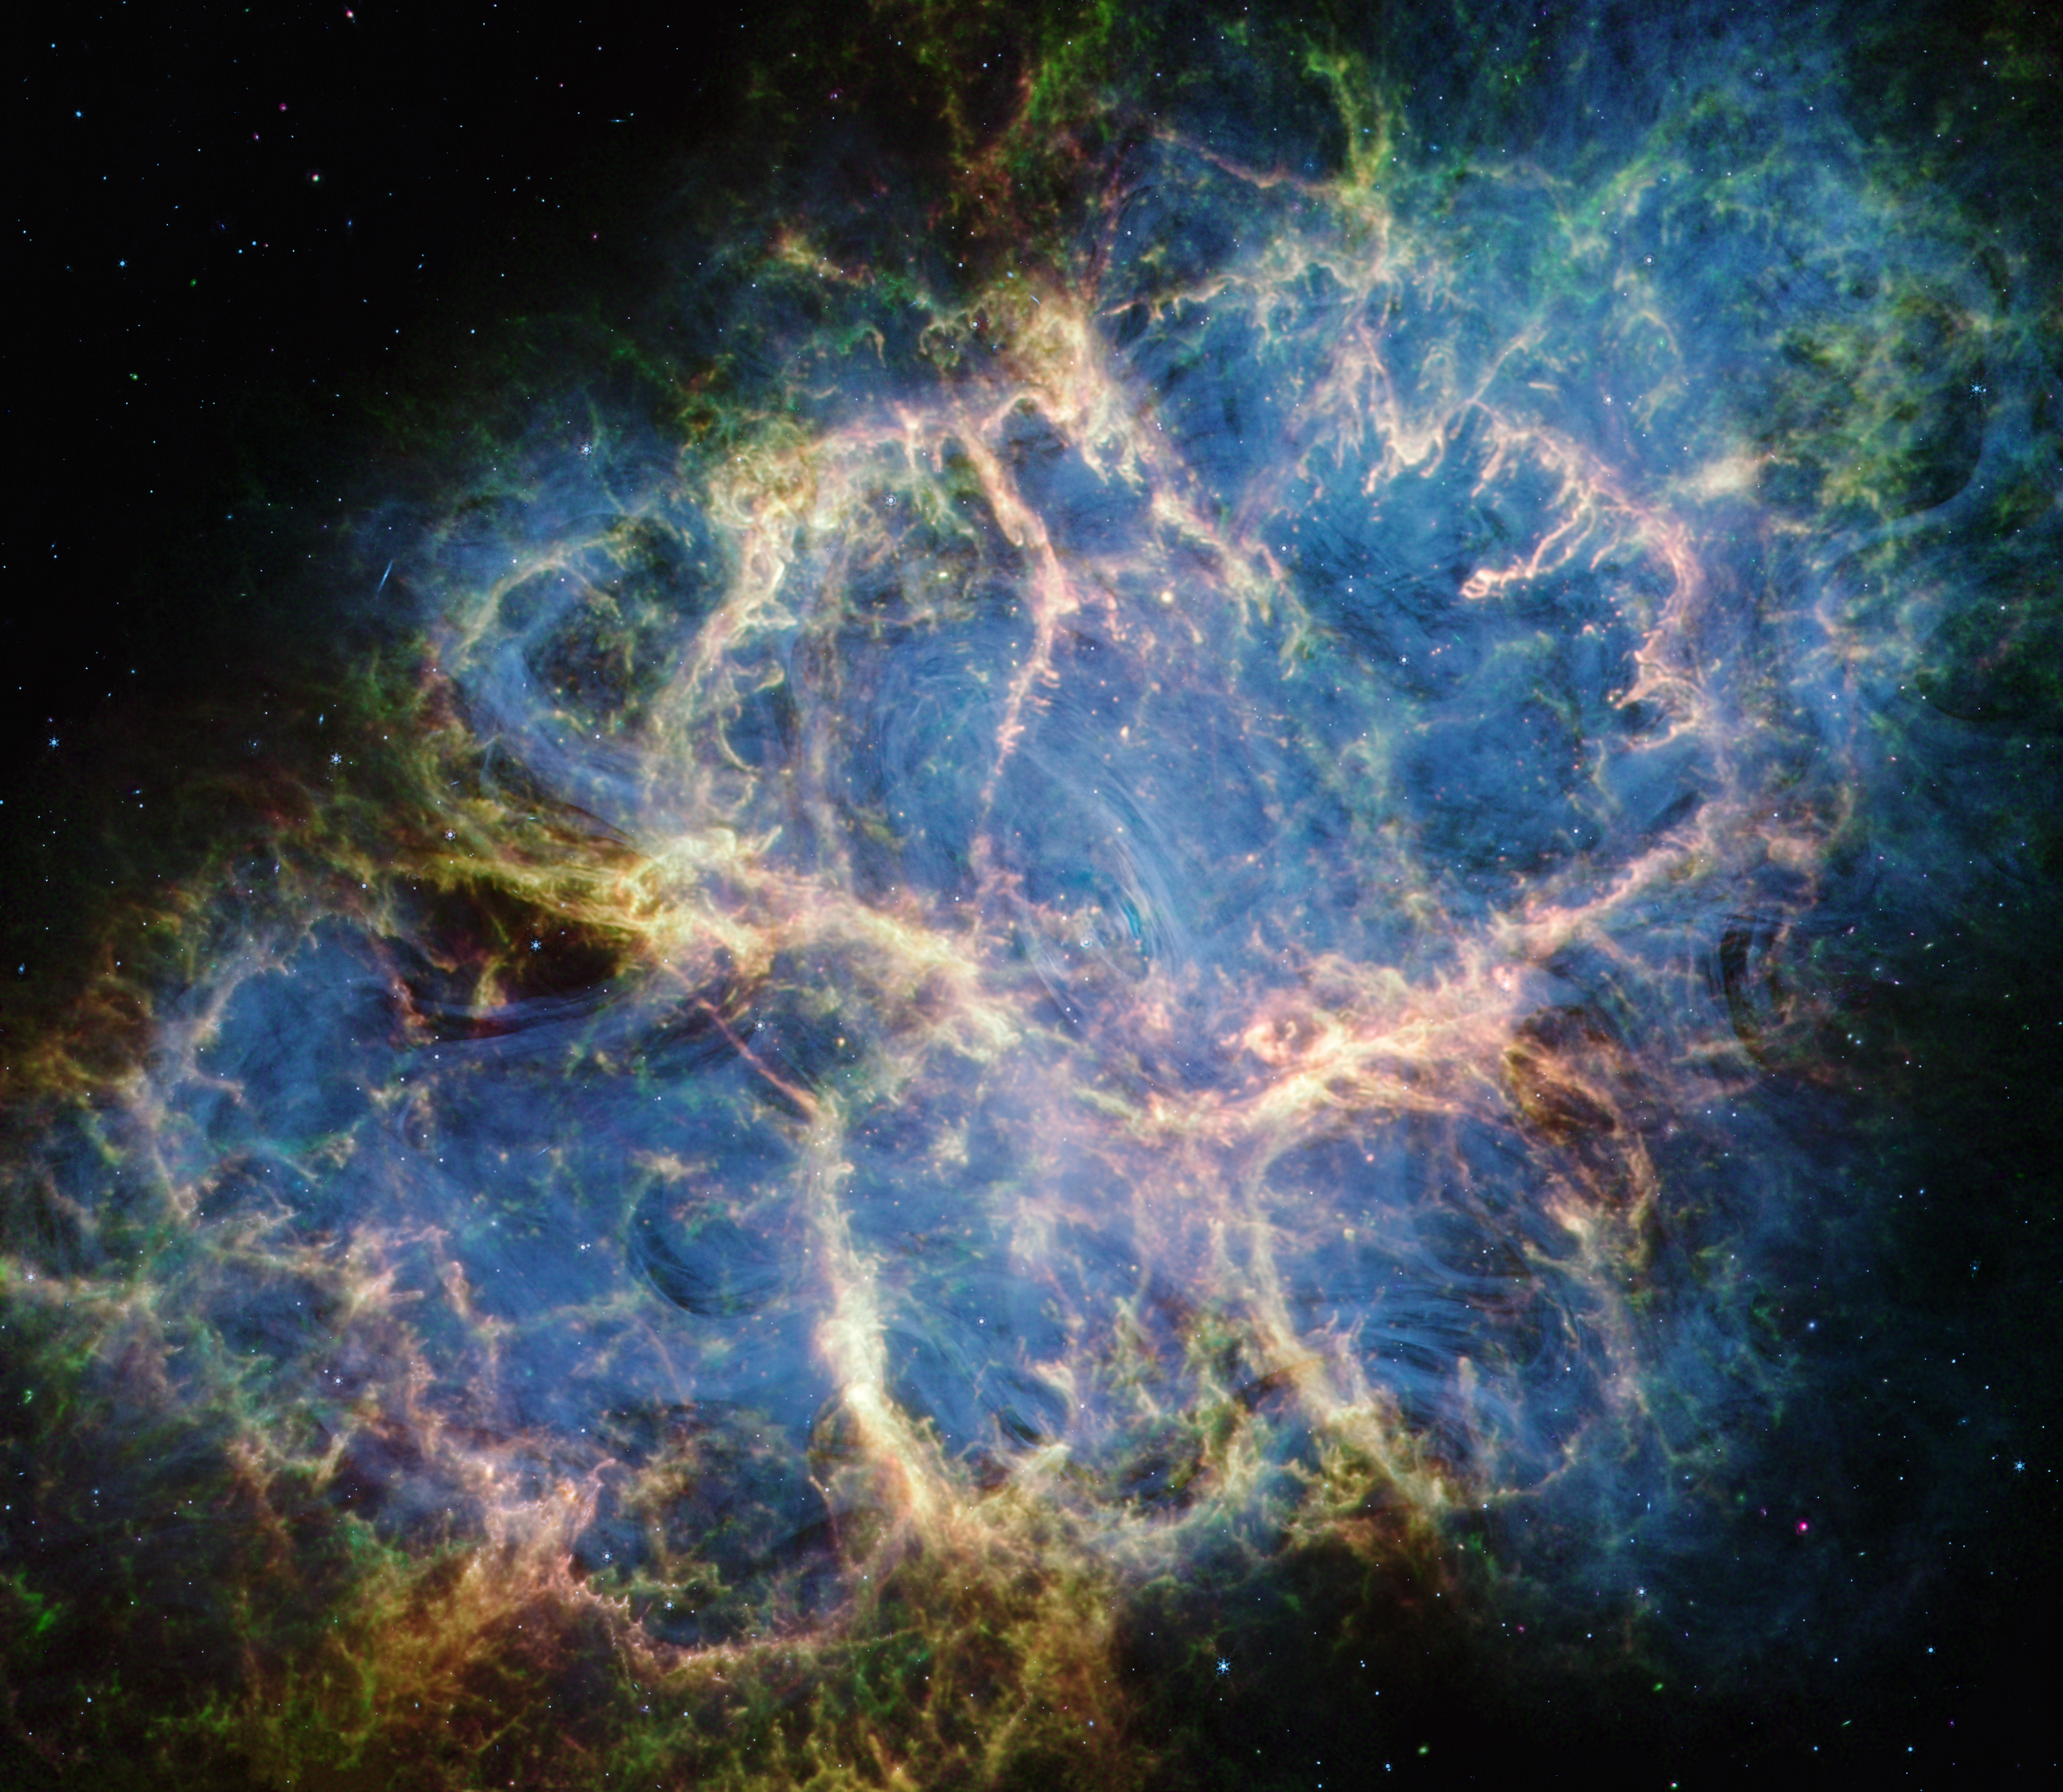

Crab Nebula (MIRI and NIRCam image)

The NASA/ESA/CSA James Webb Space Telescope dissected the Crab Nebula’s structure, aiding astronomers as they continue to evaluate leading theories about the supernova remnant’s origins. With the data collected by Webb’s NIRCam (Near-Infrared Camera) and MIRI (Mid-Infrared Instrument), a team of scientists were able to closely inspect some of the Crab Nebula’s major components.

For the first time ever, astronomers mapped the warm dust emission throughout this supernova remnant. Represented here as fluffy magenta material, the dust grains form a cage-like structure that is most apparent toward the lower left and upper right portions of the remnant. Filaments of dust are also threaded throughout the Crab’s interior and sometimes coincide with regions of doubly ionised sulphur (sulphur III), coloured in green. Yellow-white mottled filaments, which form large loop-like structures around the supernova remnant’s centre, represent areas where dust and doubly ionised sulphur overlap.

The dust’s cage-like structure helps constrain some, but not all of the ghostly synchrotron emission represented in blue. The emission resembles wisps of smoke, most notable toward the Crab’s centre. The thin blue ribbons follow the magnetic field lines created by the Crab’s pulsar heart — a rapidly rotating neutron star.

Credit: NASA, ESA, CSA, STScI, T. Temim (Princeton University)